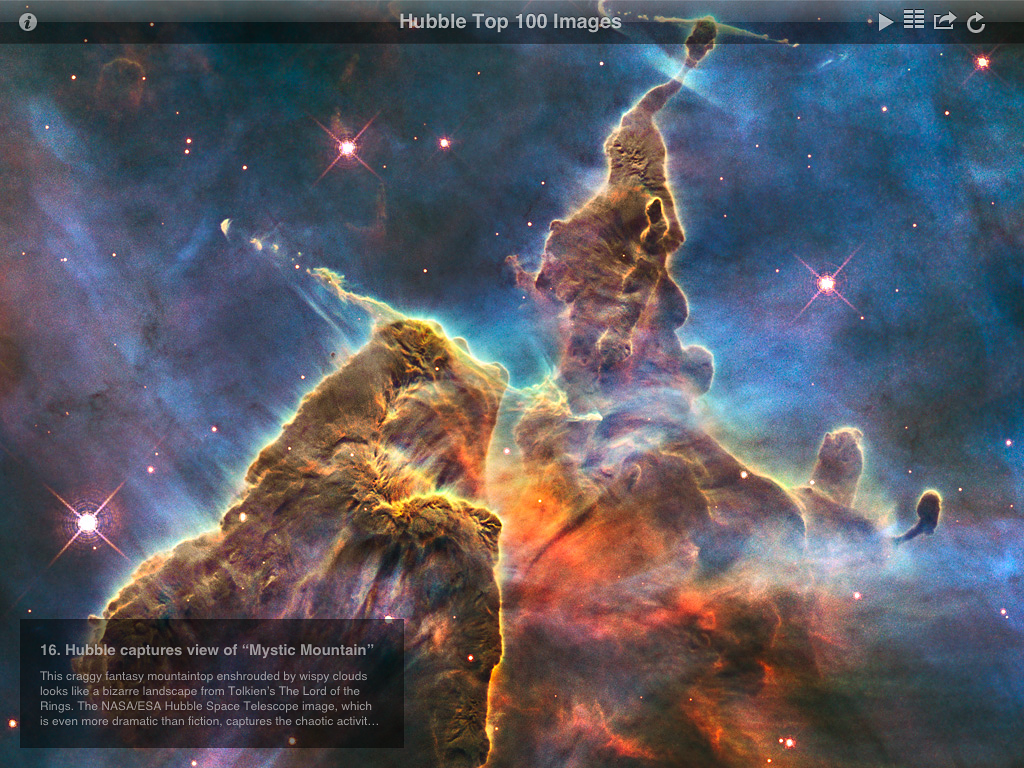

Screenshot from ESA/Hubble top 100 images v2.0 app

This is a screenshot showing one of the spectacular astronomical images from the updated version of ESA/Hubble popular Top 100 Images app. The new version takes full advantage of the third generation iPad retina display and quad core graphics.

Credit: ESA/Hubble